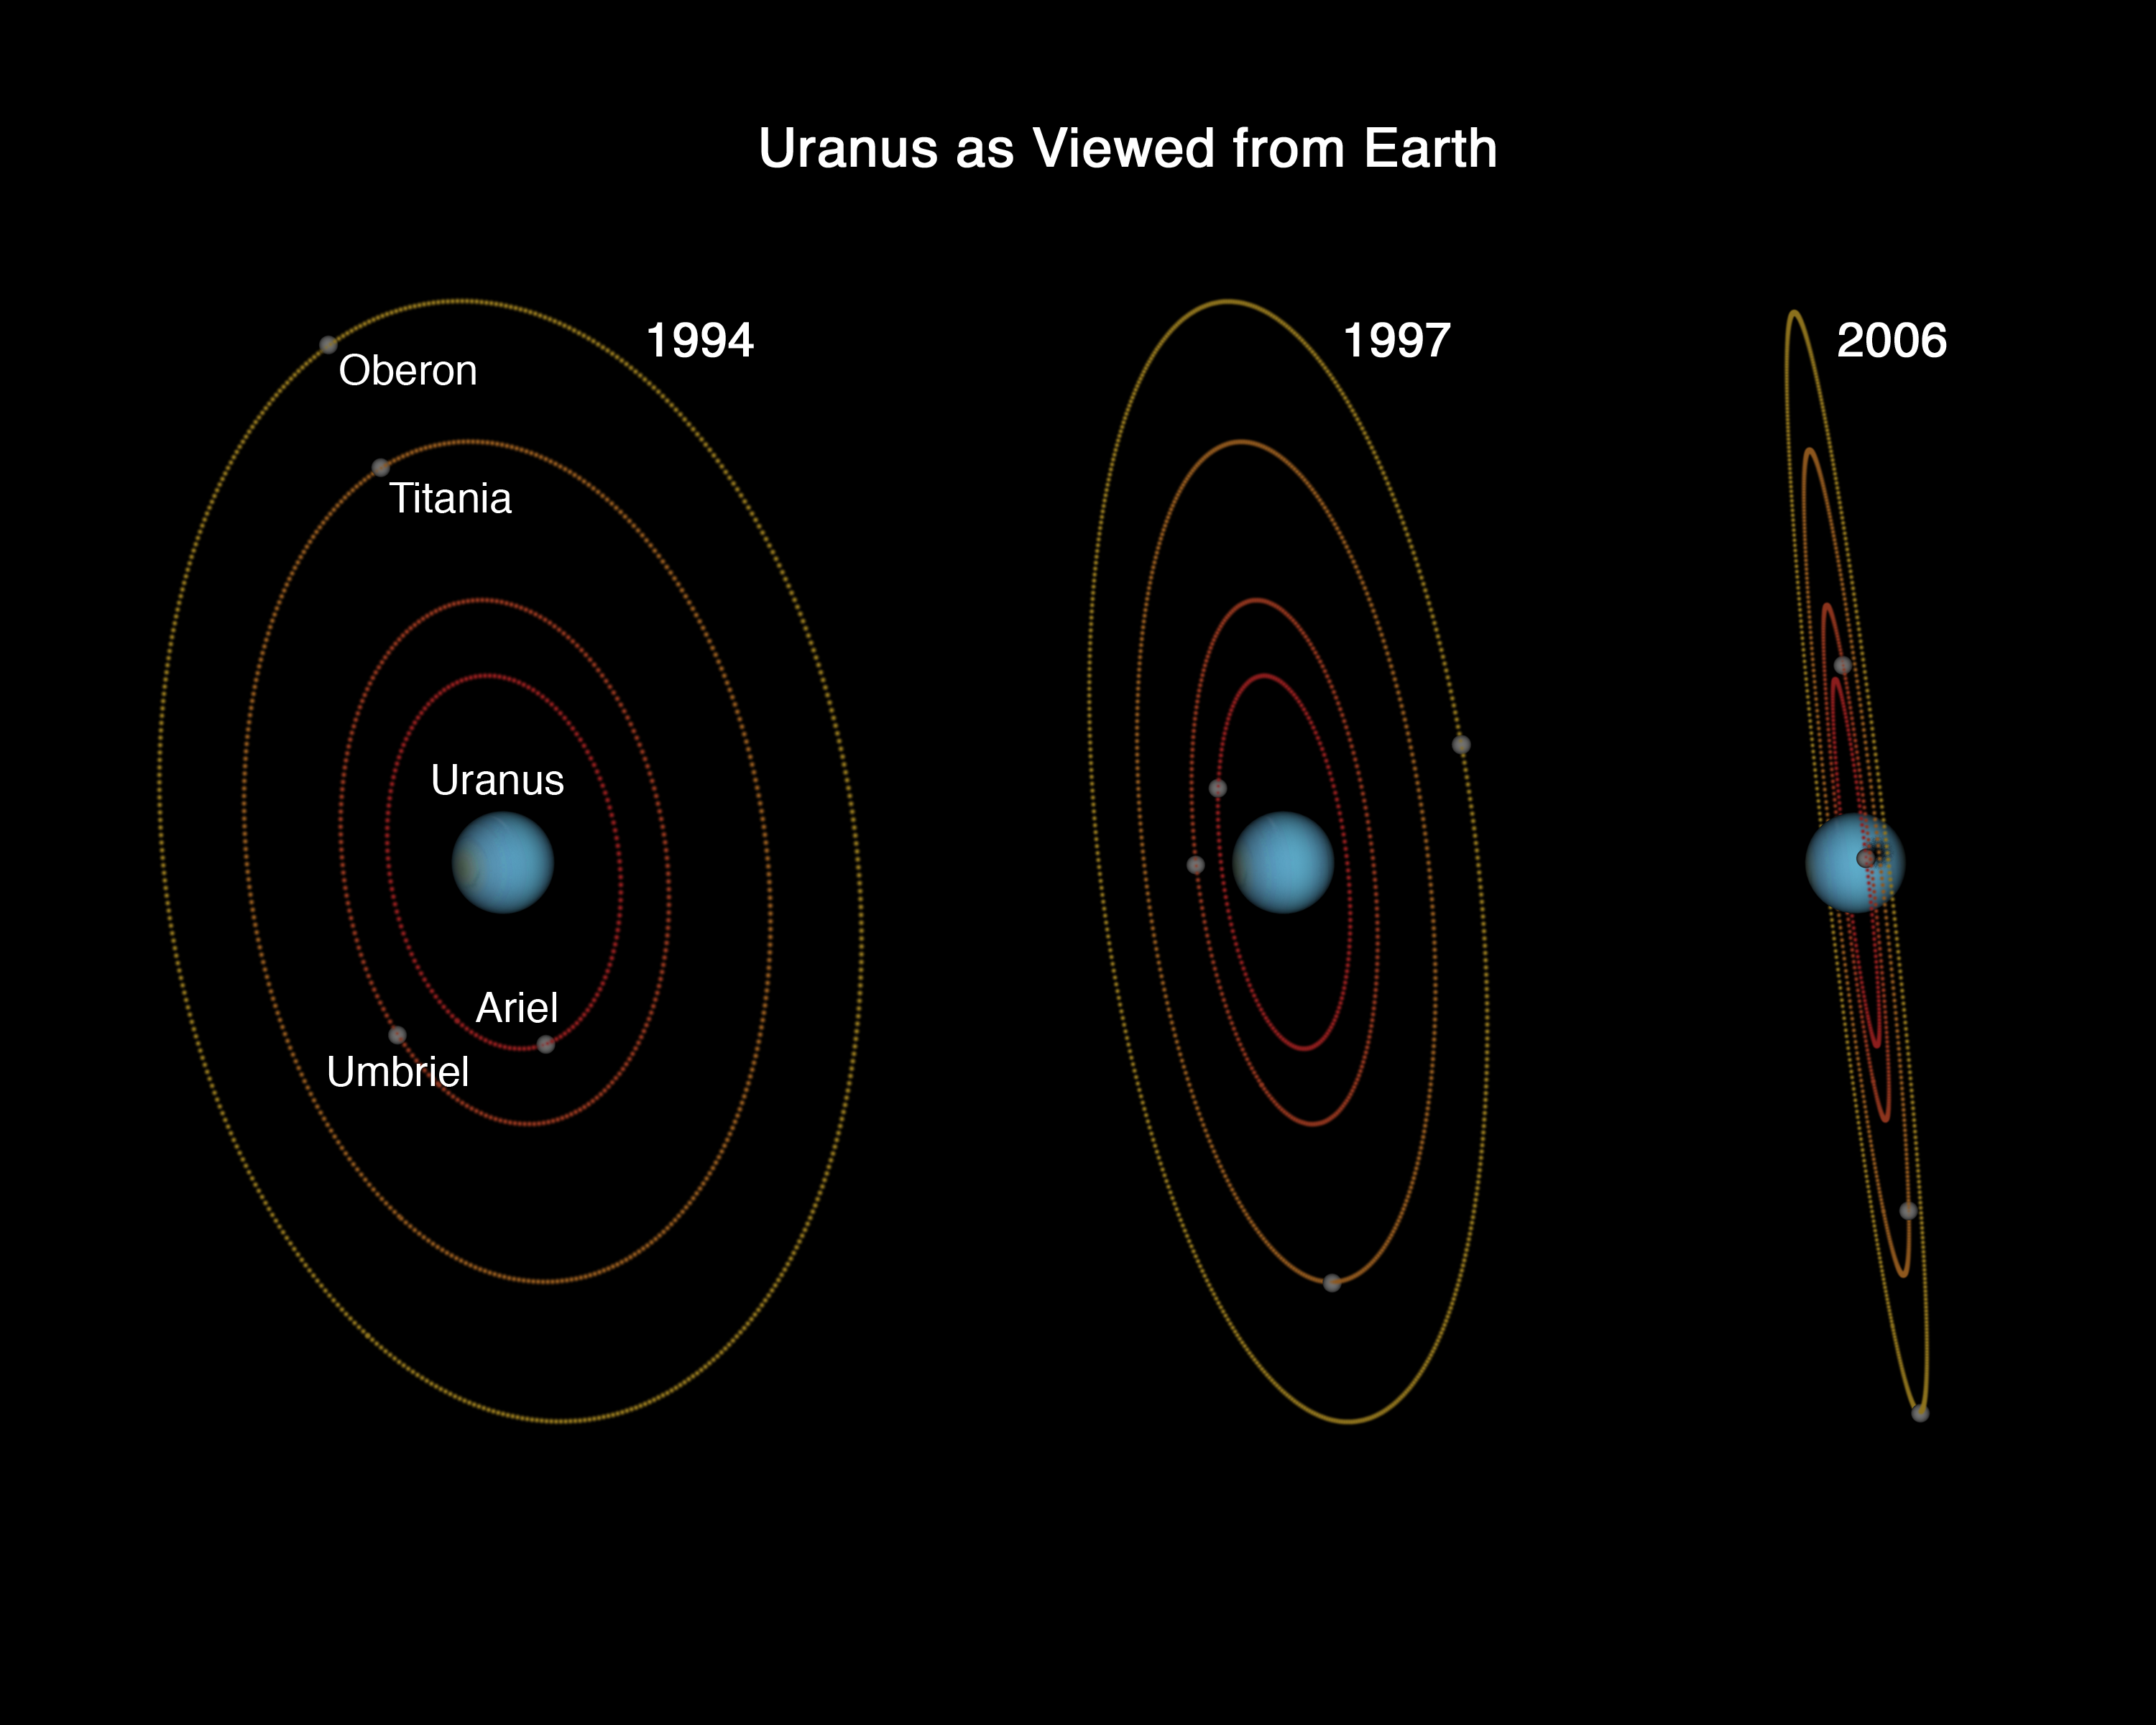

Uranus as Viewed from Earth - 1994, 1997, 2006

This diagram shows how the inclination of orbits of Uranus' moons have appeared increasingly more oblique over the past 12 years due to Uranus's orbit about the Sun. Hubble Space Telescope has been watching Uranus over that period and has traced, in detail, our changing view of the planet. Uranus is tilted so that its spin axis lies nearly in its orbital plane. This means that only around the time when Uranus's equator is aimed at the Sun (every 42 years) do the orbits of its satellites lie edge-on to the Sun, allowing their shadows to strike the planet, producing solar eclipses on the planet.

Credit: NASA, ESA, and G. Bacon (STScI)